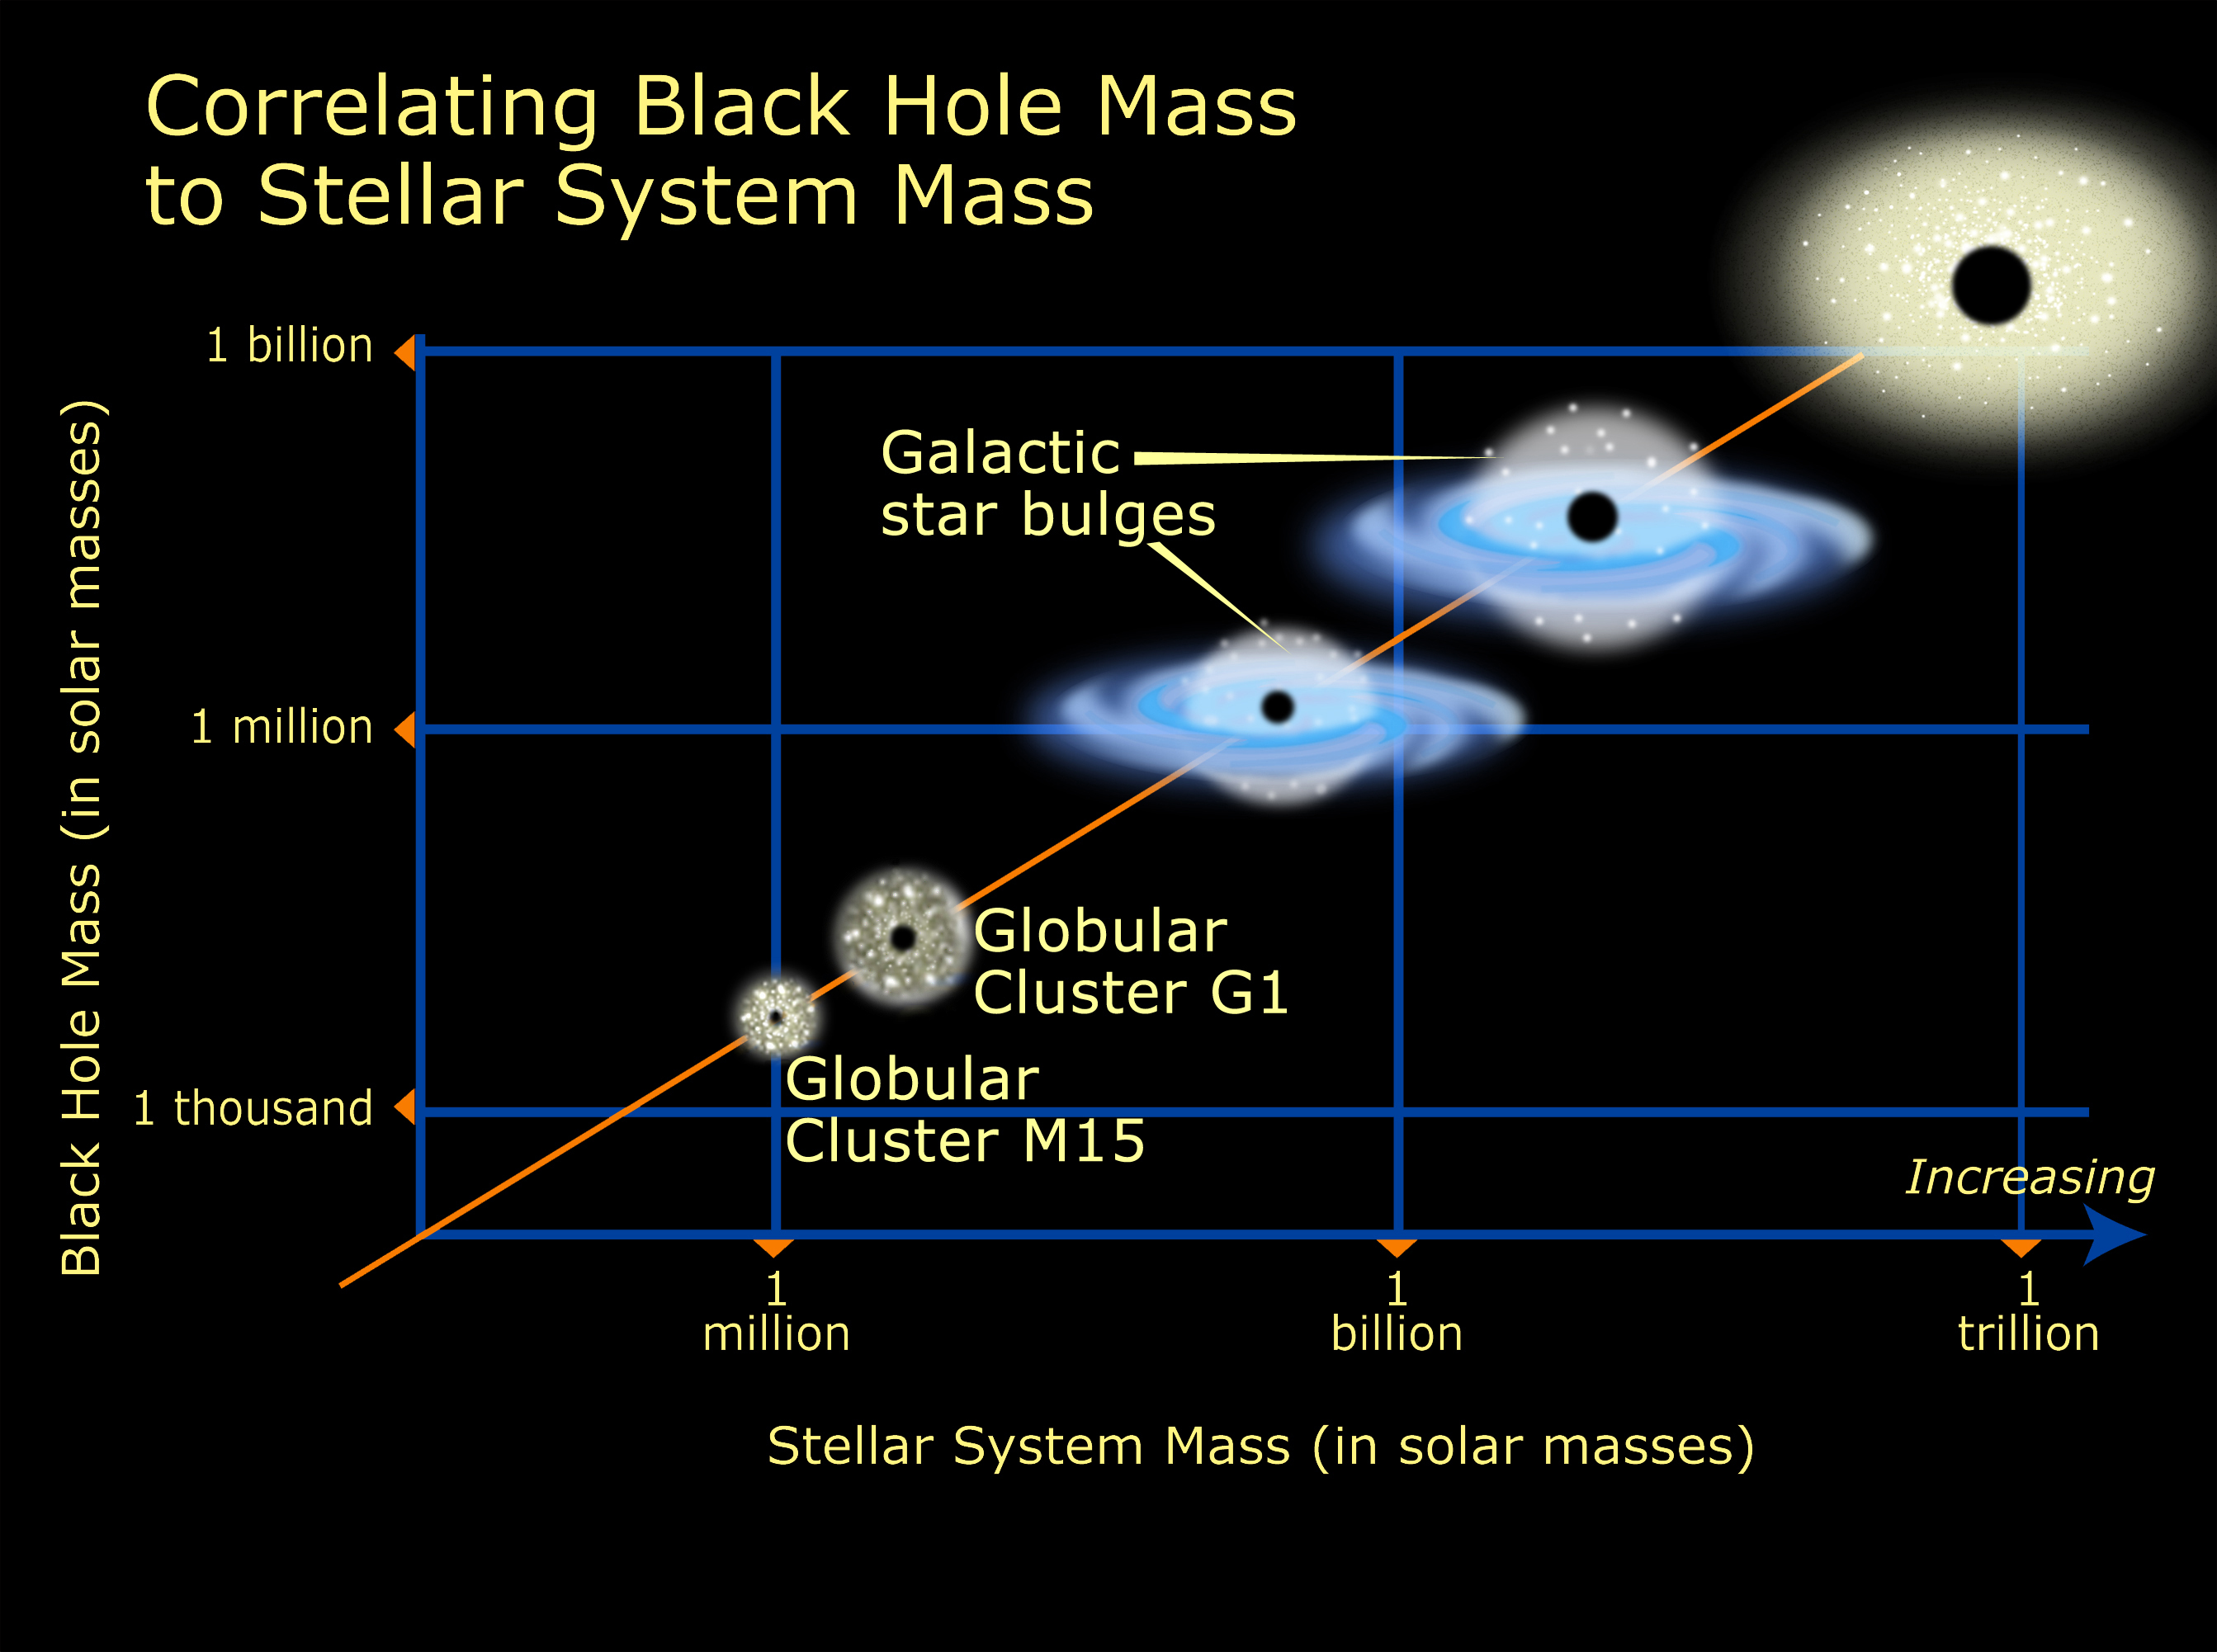

Relation of black hole mass to cluster mass

Medium-size black holes actually do exist, according to the latest findings from NASA/ESA Hubble Space Telescope, but scientists had to look in some unexpected places to find them. The previously undiscovered black holes provide an important link that sheds light on the way in which black holes grow. Even more odd, these new black holes were found in the cores of glittering, 'beehive' swarms of stars called globular star clusters, which orbit our Milky Way and other galaxies. The black hole in globular cluster M15 is 4, 000 times more massive than our Sun. G1, a much larger globular cluster, harbors a heftier black hole, about 20, 000 times more massive than our Sun.

Credit: NASA/ESA and A. Feild (STScI)